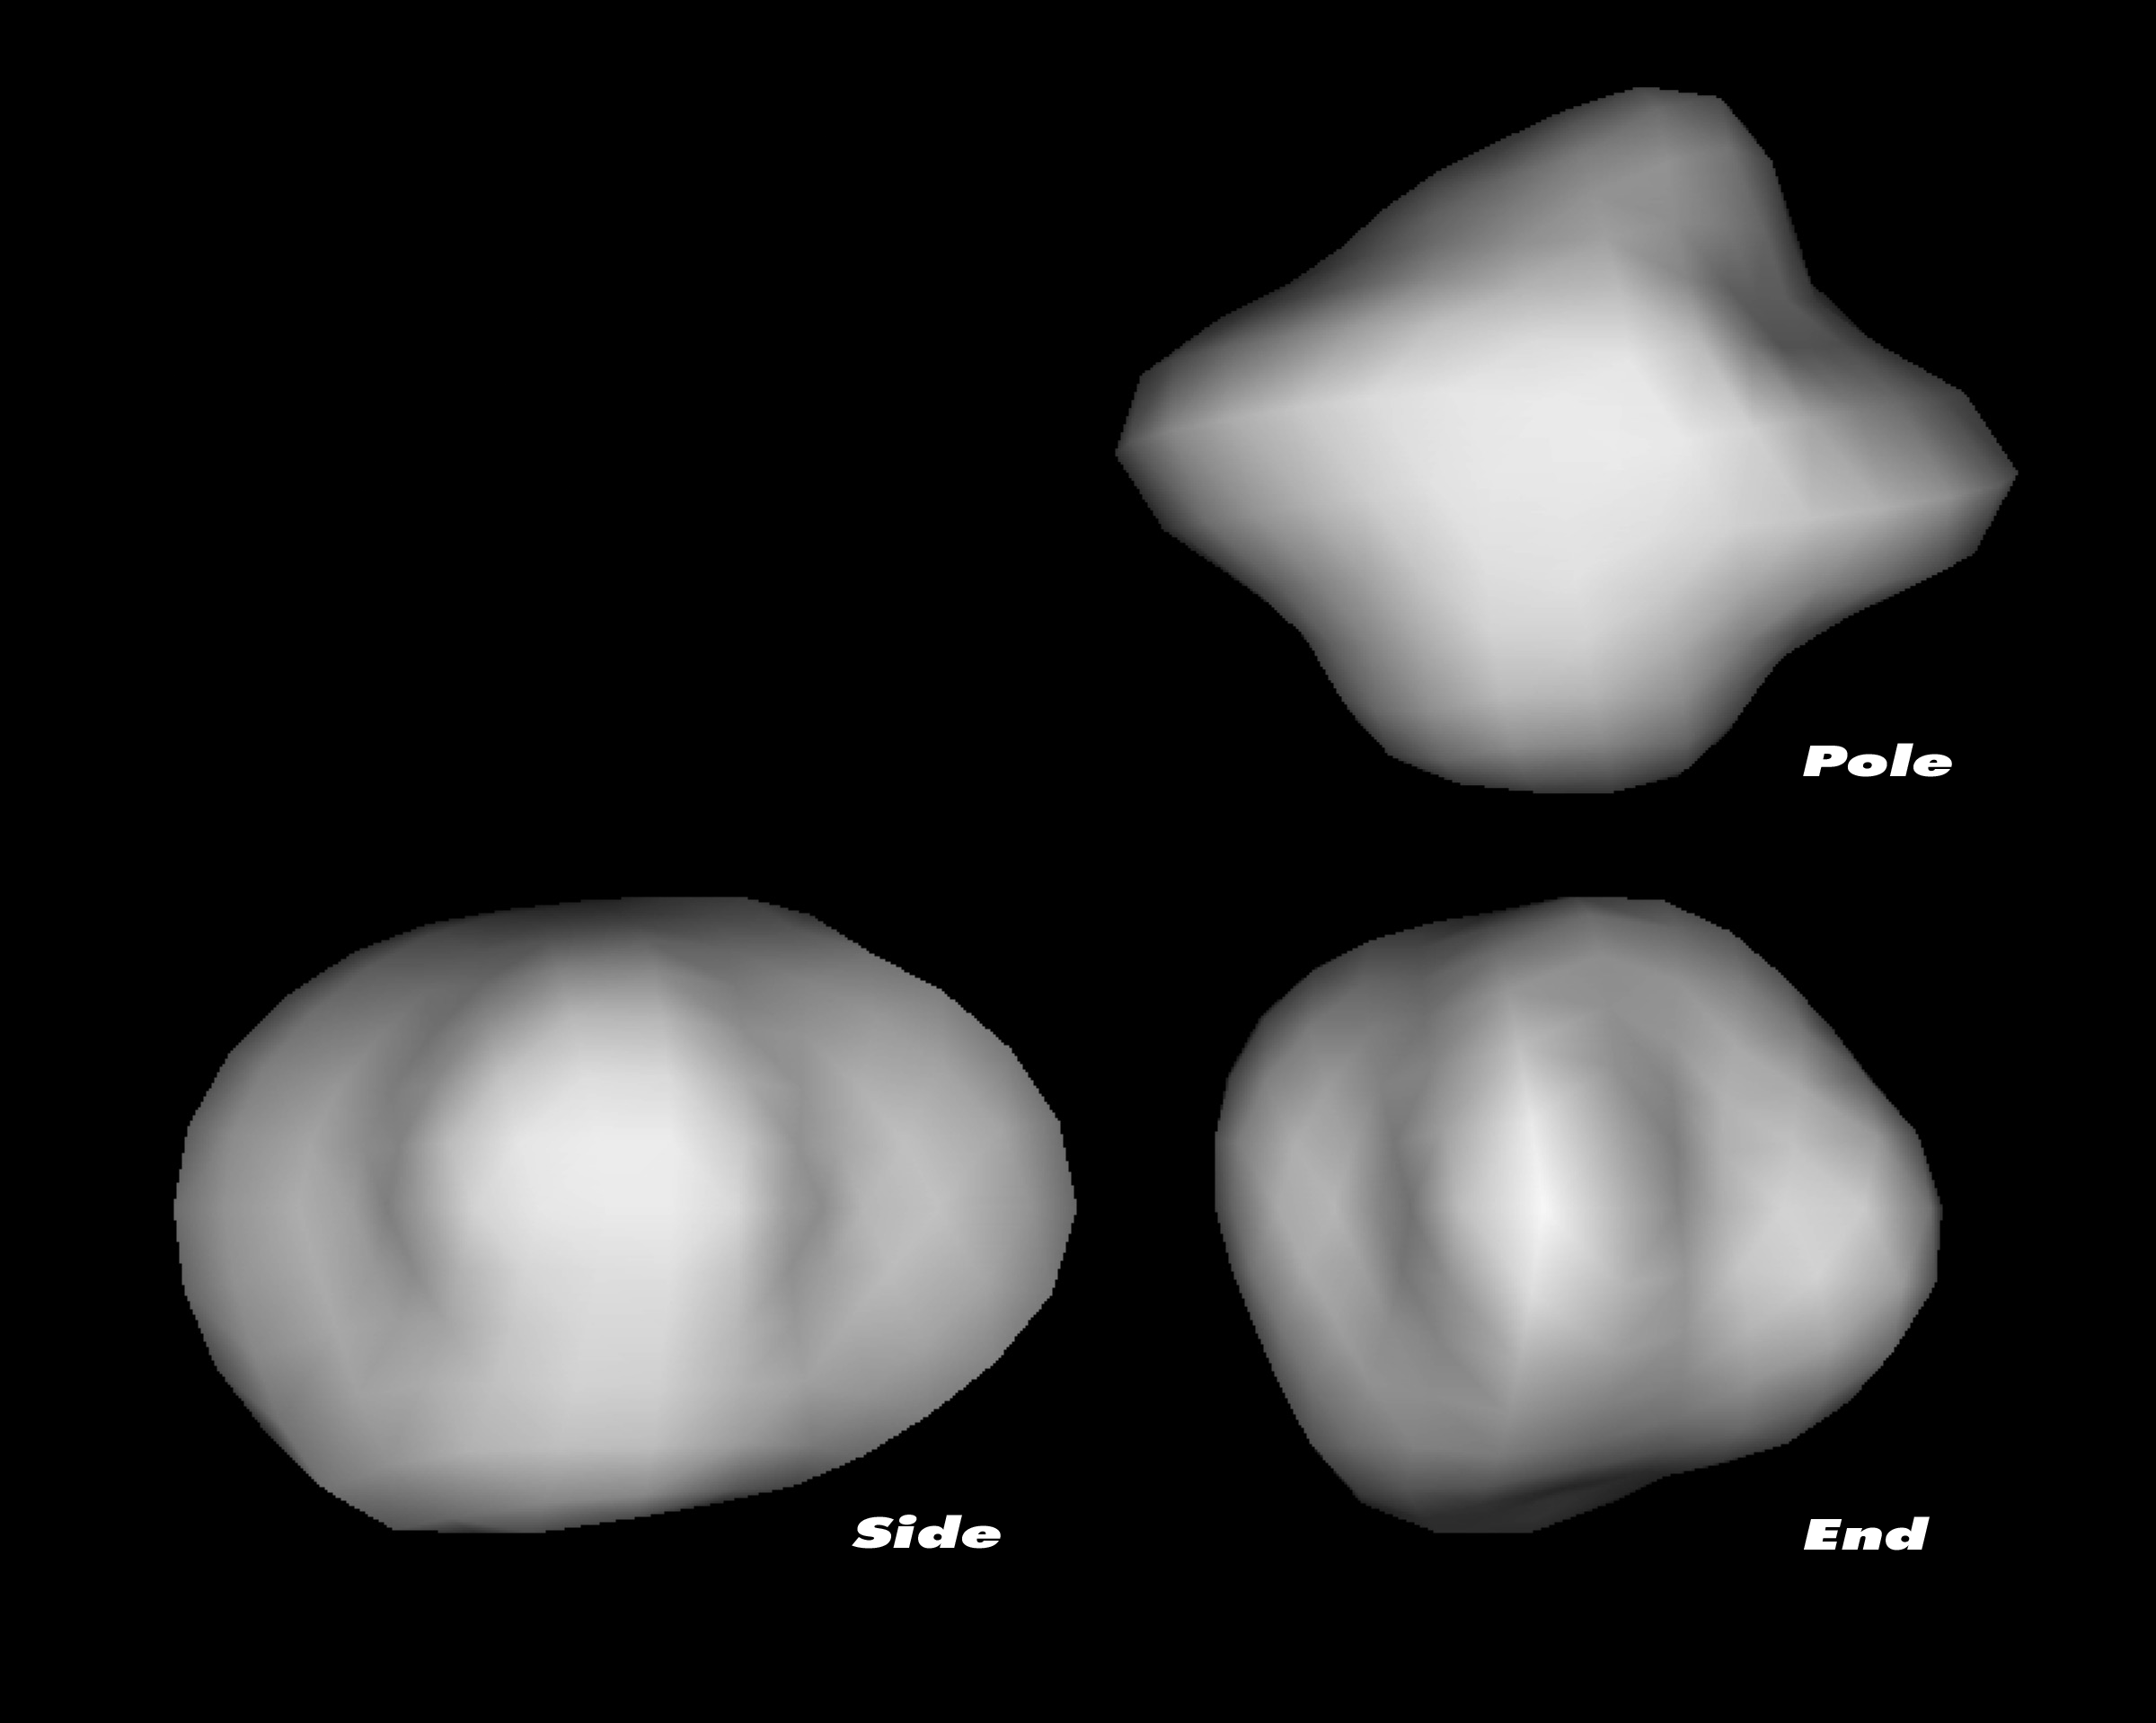

3-D models of comet 67P/Churyumov-Gerasimenko's nucleus

Hubble measured the size, shape and rotational period of the Rosetta mission's backup target, comet 67P/Churyumov-Gerasimenko (67P/C-G). The telescope's observations from March 2003 revealed that comet 67P/Churyumov-Gerasimenko (67P/C-G) is approximately five-by-three kilometres, and shaped like a rugby ball on which it is possible to land. ESA Mission scientists were concerned about the exact size of the solid nucleus, which is needed to adapt the mission to the comet's gravity.

Credit: NASA, European Space Agency and Philippe Lamy (Laboratoire d'Astronomie Spatiale, France)